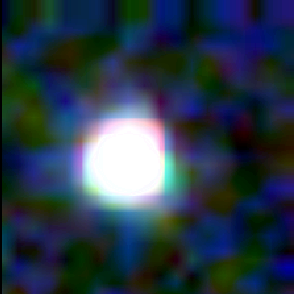

Galaxy building blocks

This is one Proto Galaxy out of a series of 18, taken by the Wide Field Planetary Camera 2.

Credit: Rogier Windhorst and Sam Pascarelle (Arizona State University) and NASA/ESA